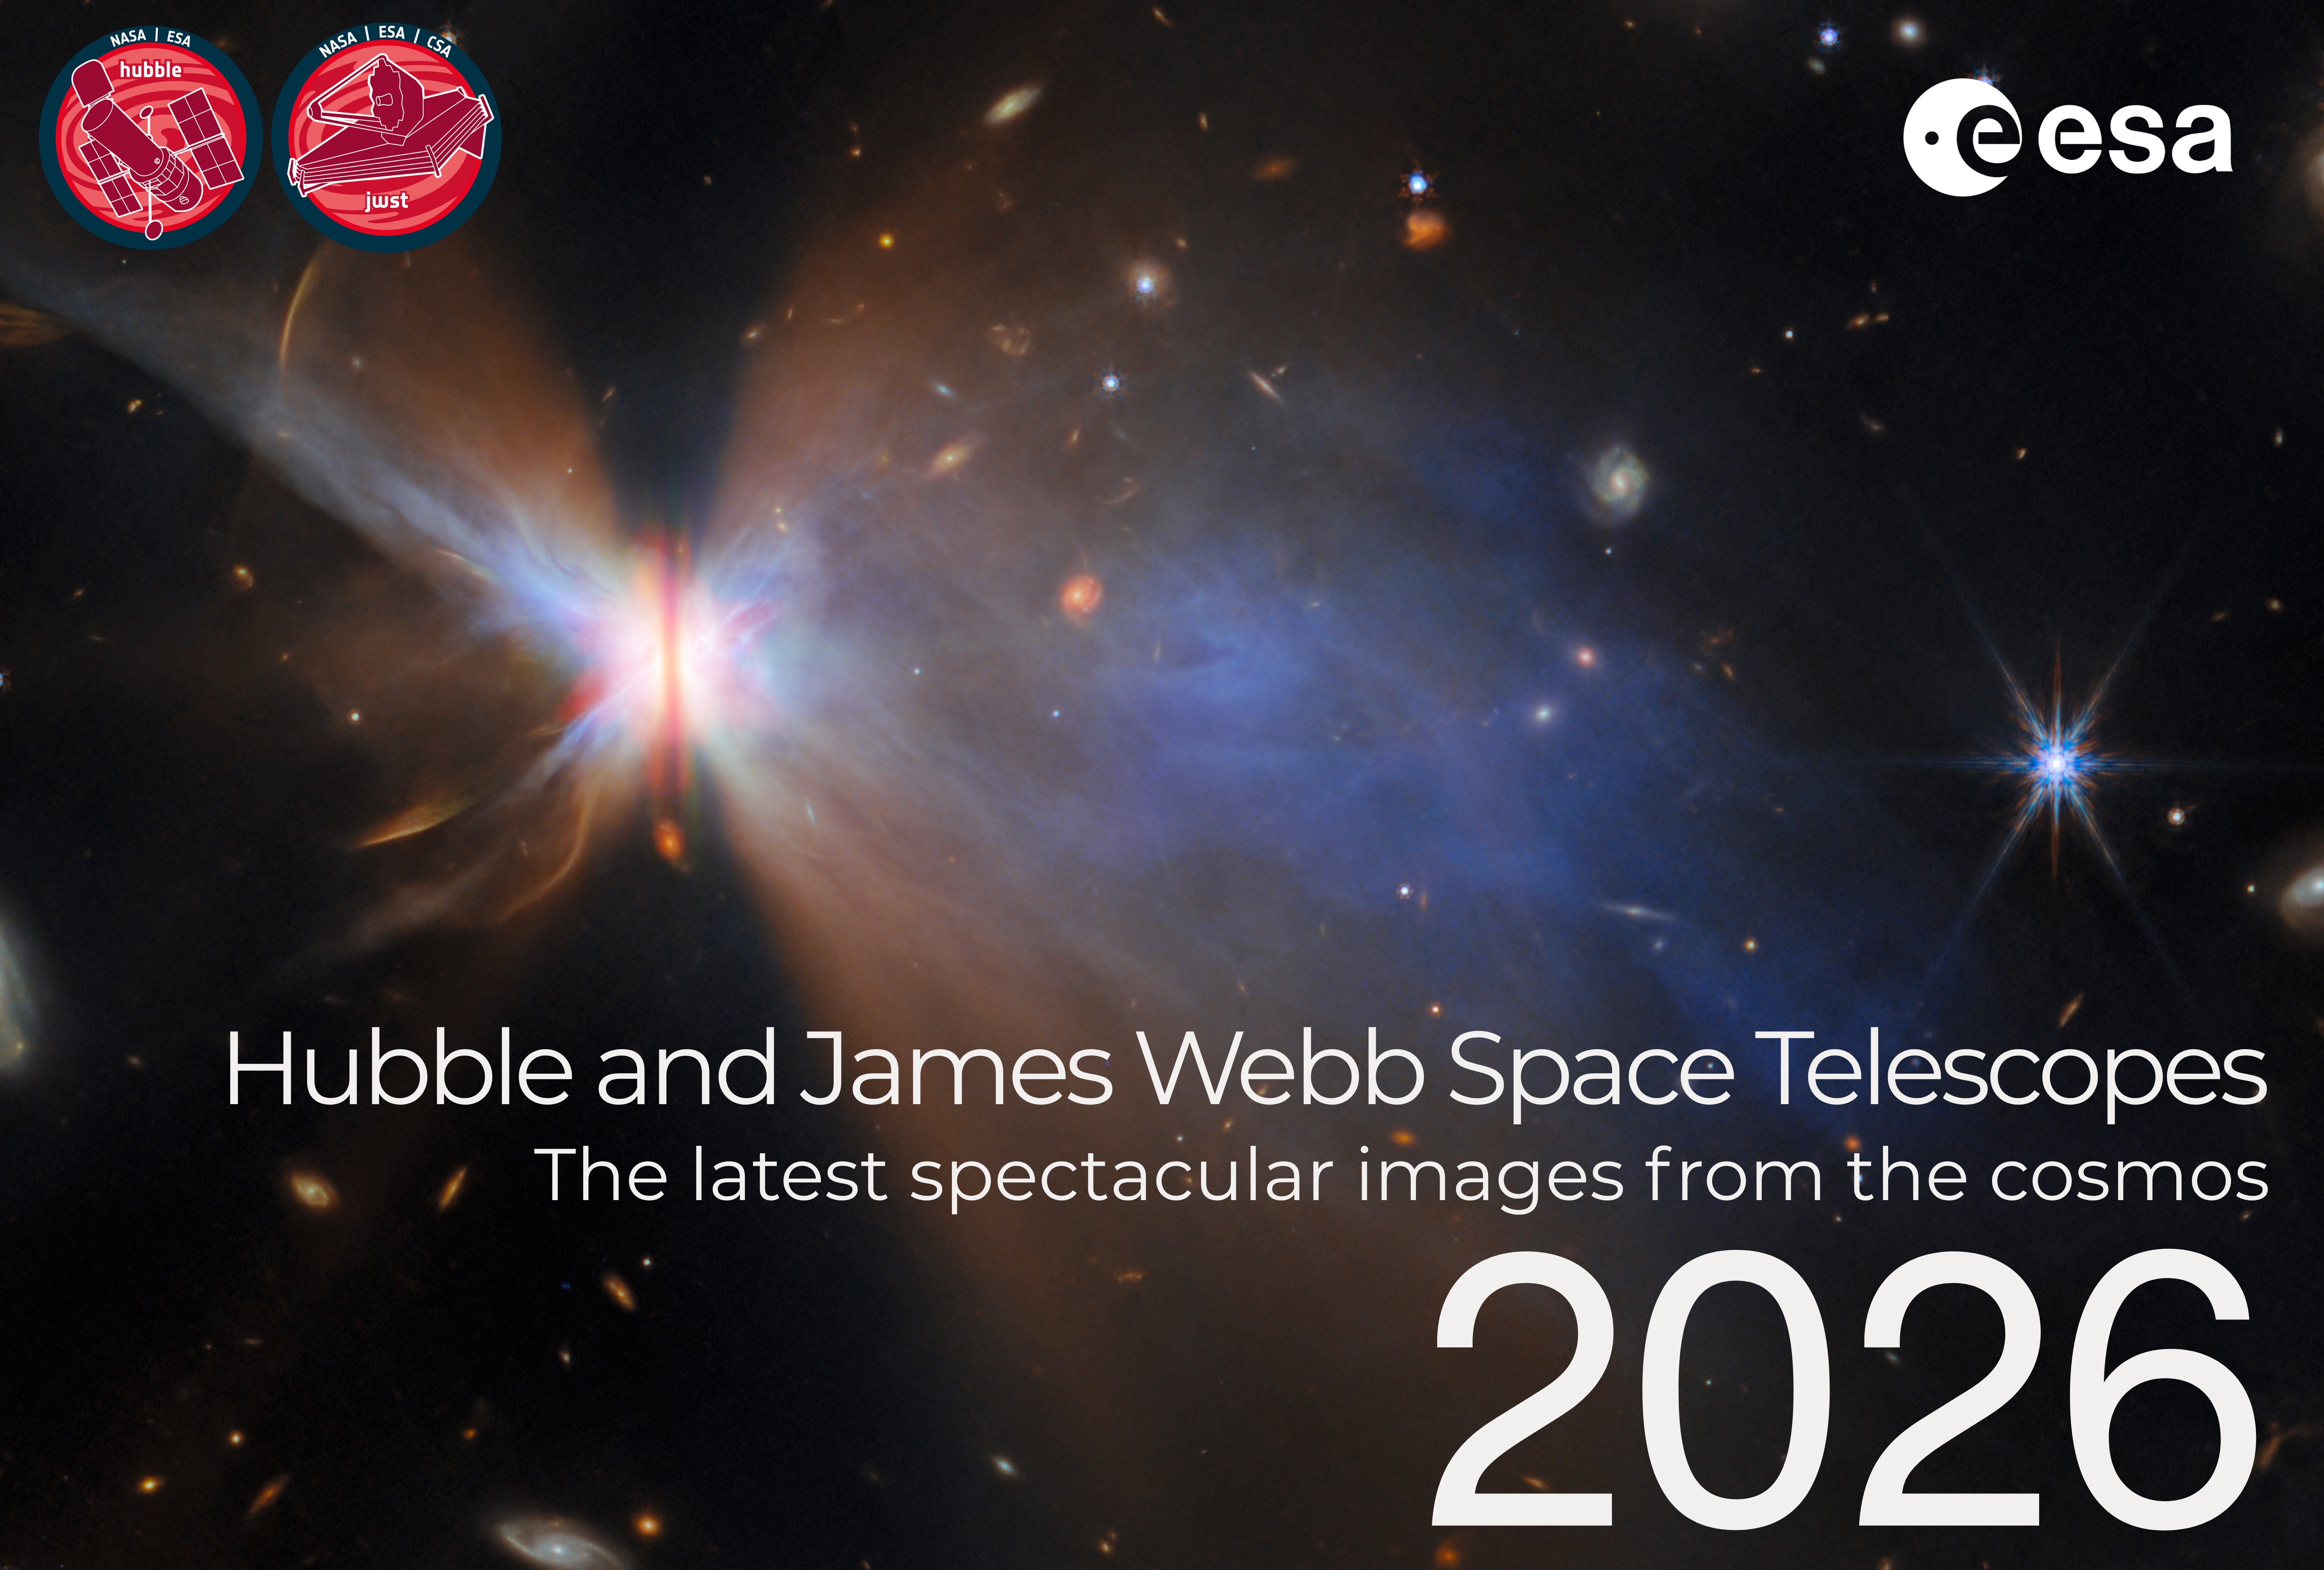

Cover page of the 2026 ESA/Hubble and ESA/Webb calendar

This is the cover page for the 2026 ESA/Hubble and ESA/Webb Calendar, featuring images released in 2025. The electronic version of the calendar is available in digital (low and high resolution) and print-ready versions for everyone to share and enjoy.

Credit: ESA/Hubble, ESA/Webb